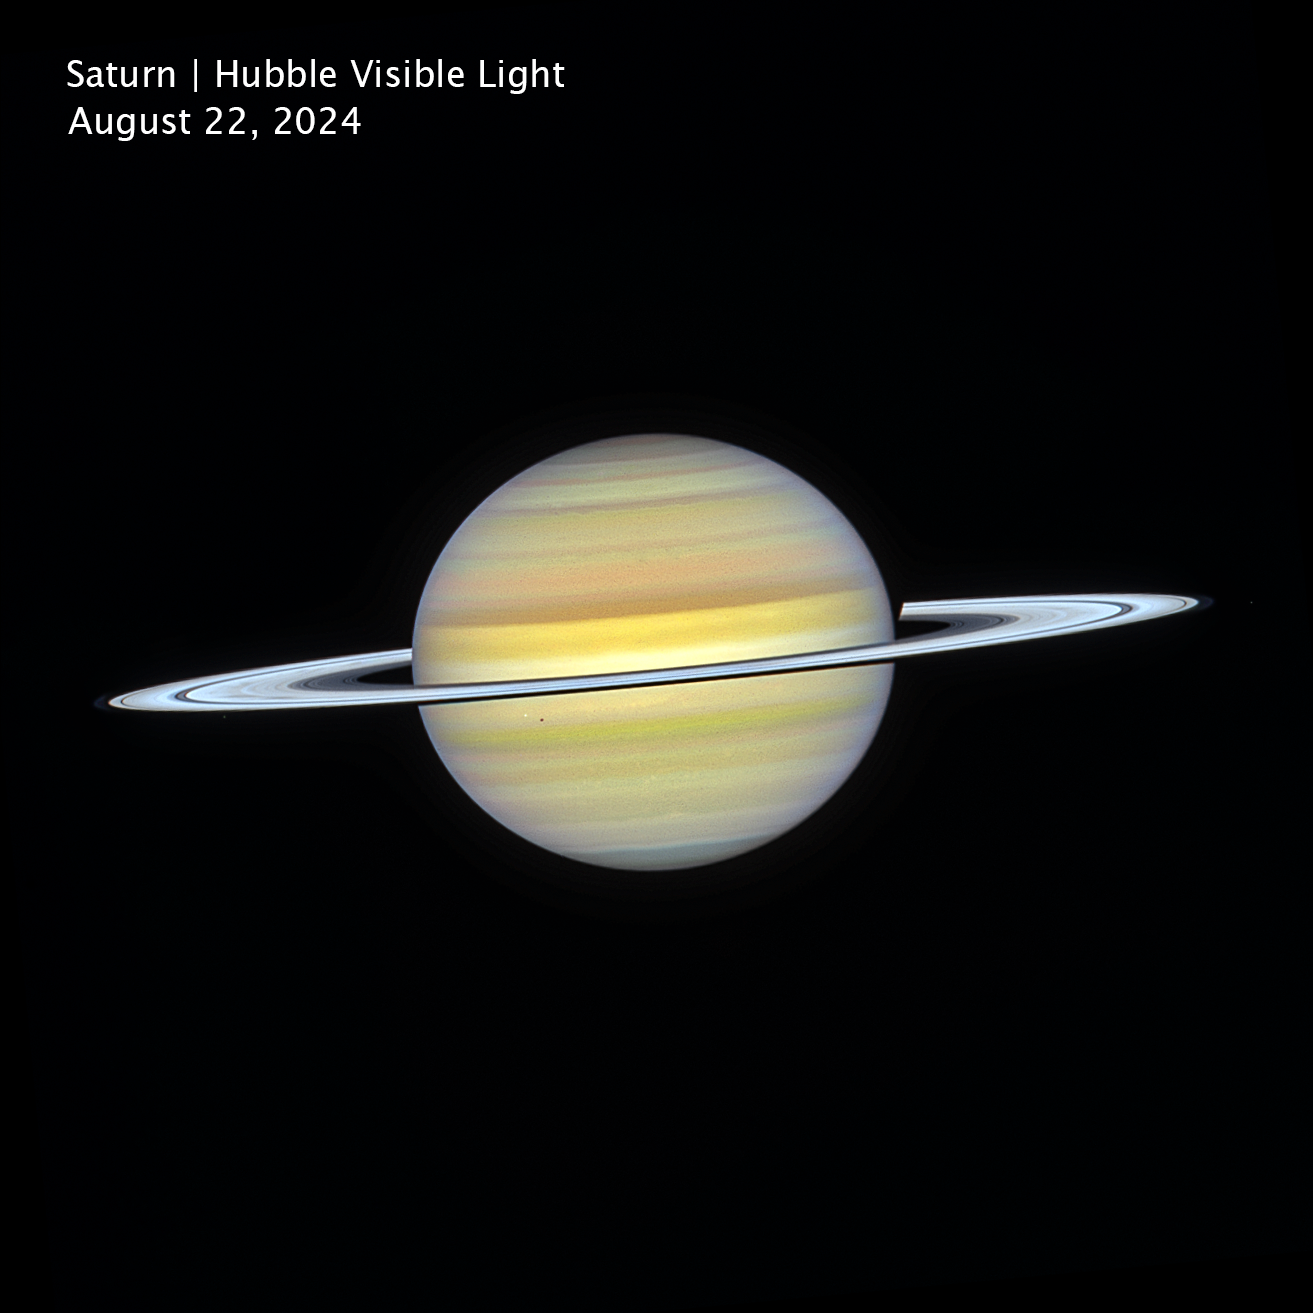

Saturn (Hubble image, cropped and clean)

This visible-light image of Saturn, captured on 22 August 2024, by the NASA/ESA Hubble Space Telescope as part of its long-running Outer Planet Atmospheres Legacy (OPAL) program, reveals the planet’s softly banded atmosphere and bright ring system.

Several of Saturn’s larger moons appear in the image. Janus is visible to the left of the planet along the rings, while Mimas appears closer to the disk as a small point of light, with its shadow superimposed on Saturn. On the right side of the image is Epimetheus, a moon that shares a unique co-orbital relationship with Janus.

The image helps scientists track seasonal changes, storms, and evolving atmospheric features on the ringed giant over time.

Credit: NASA, ESA, A. Simon (NASA-GSFC), M. Wong (University of California); Image Processing: J. DePasquale (STScI)